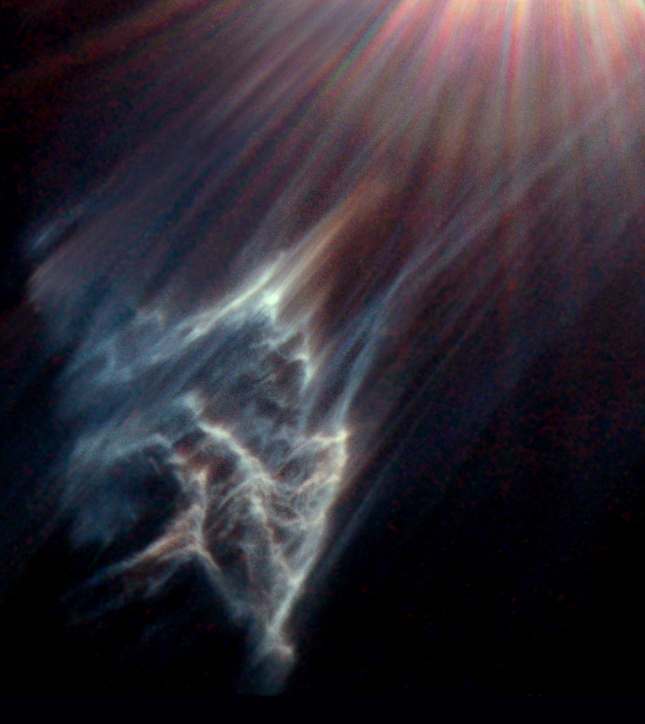

Ghostly reflections in the Pleiades

The Hubble Space Telescope has caught the eerie, wispy tendrils of a dark interstellar cloud being destroyed by the passage of one of the brightest stars in the Pleiades star cluster. Like a flashlight beam shining off the wall of a cave, the star is reflecting light off the surface of pitch black clouds of cold gas laced with dust. These are called reflection nebulae.

Credit: NASA/ESA and The Hubble Heritage Team (STScI/AURA), George Herbig and Theodore Simon (University of Hawaii).